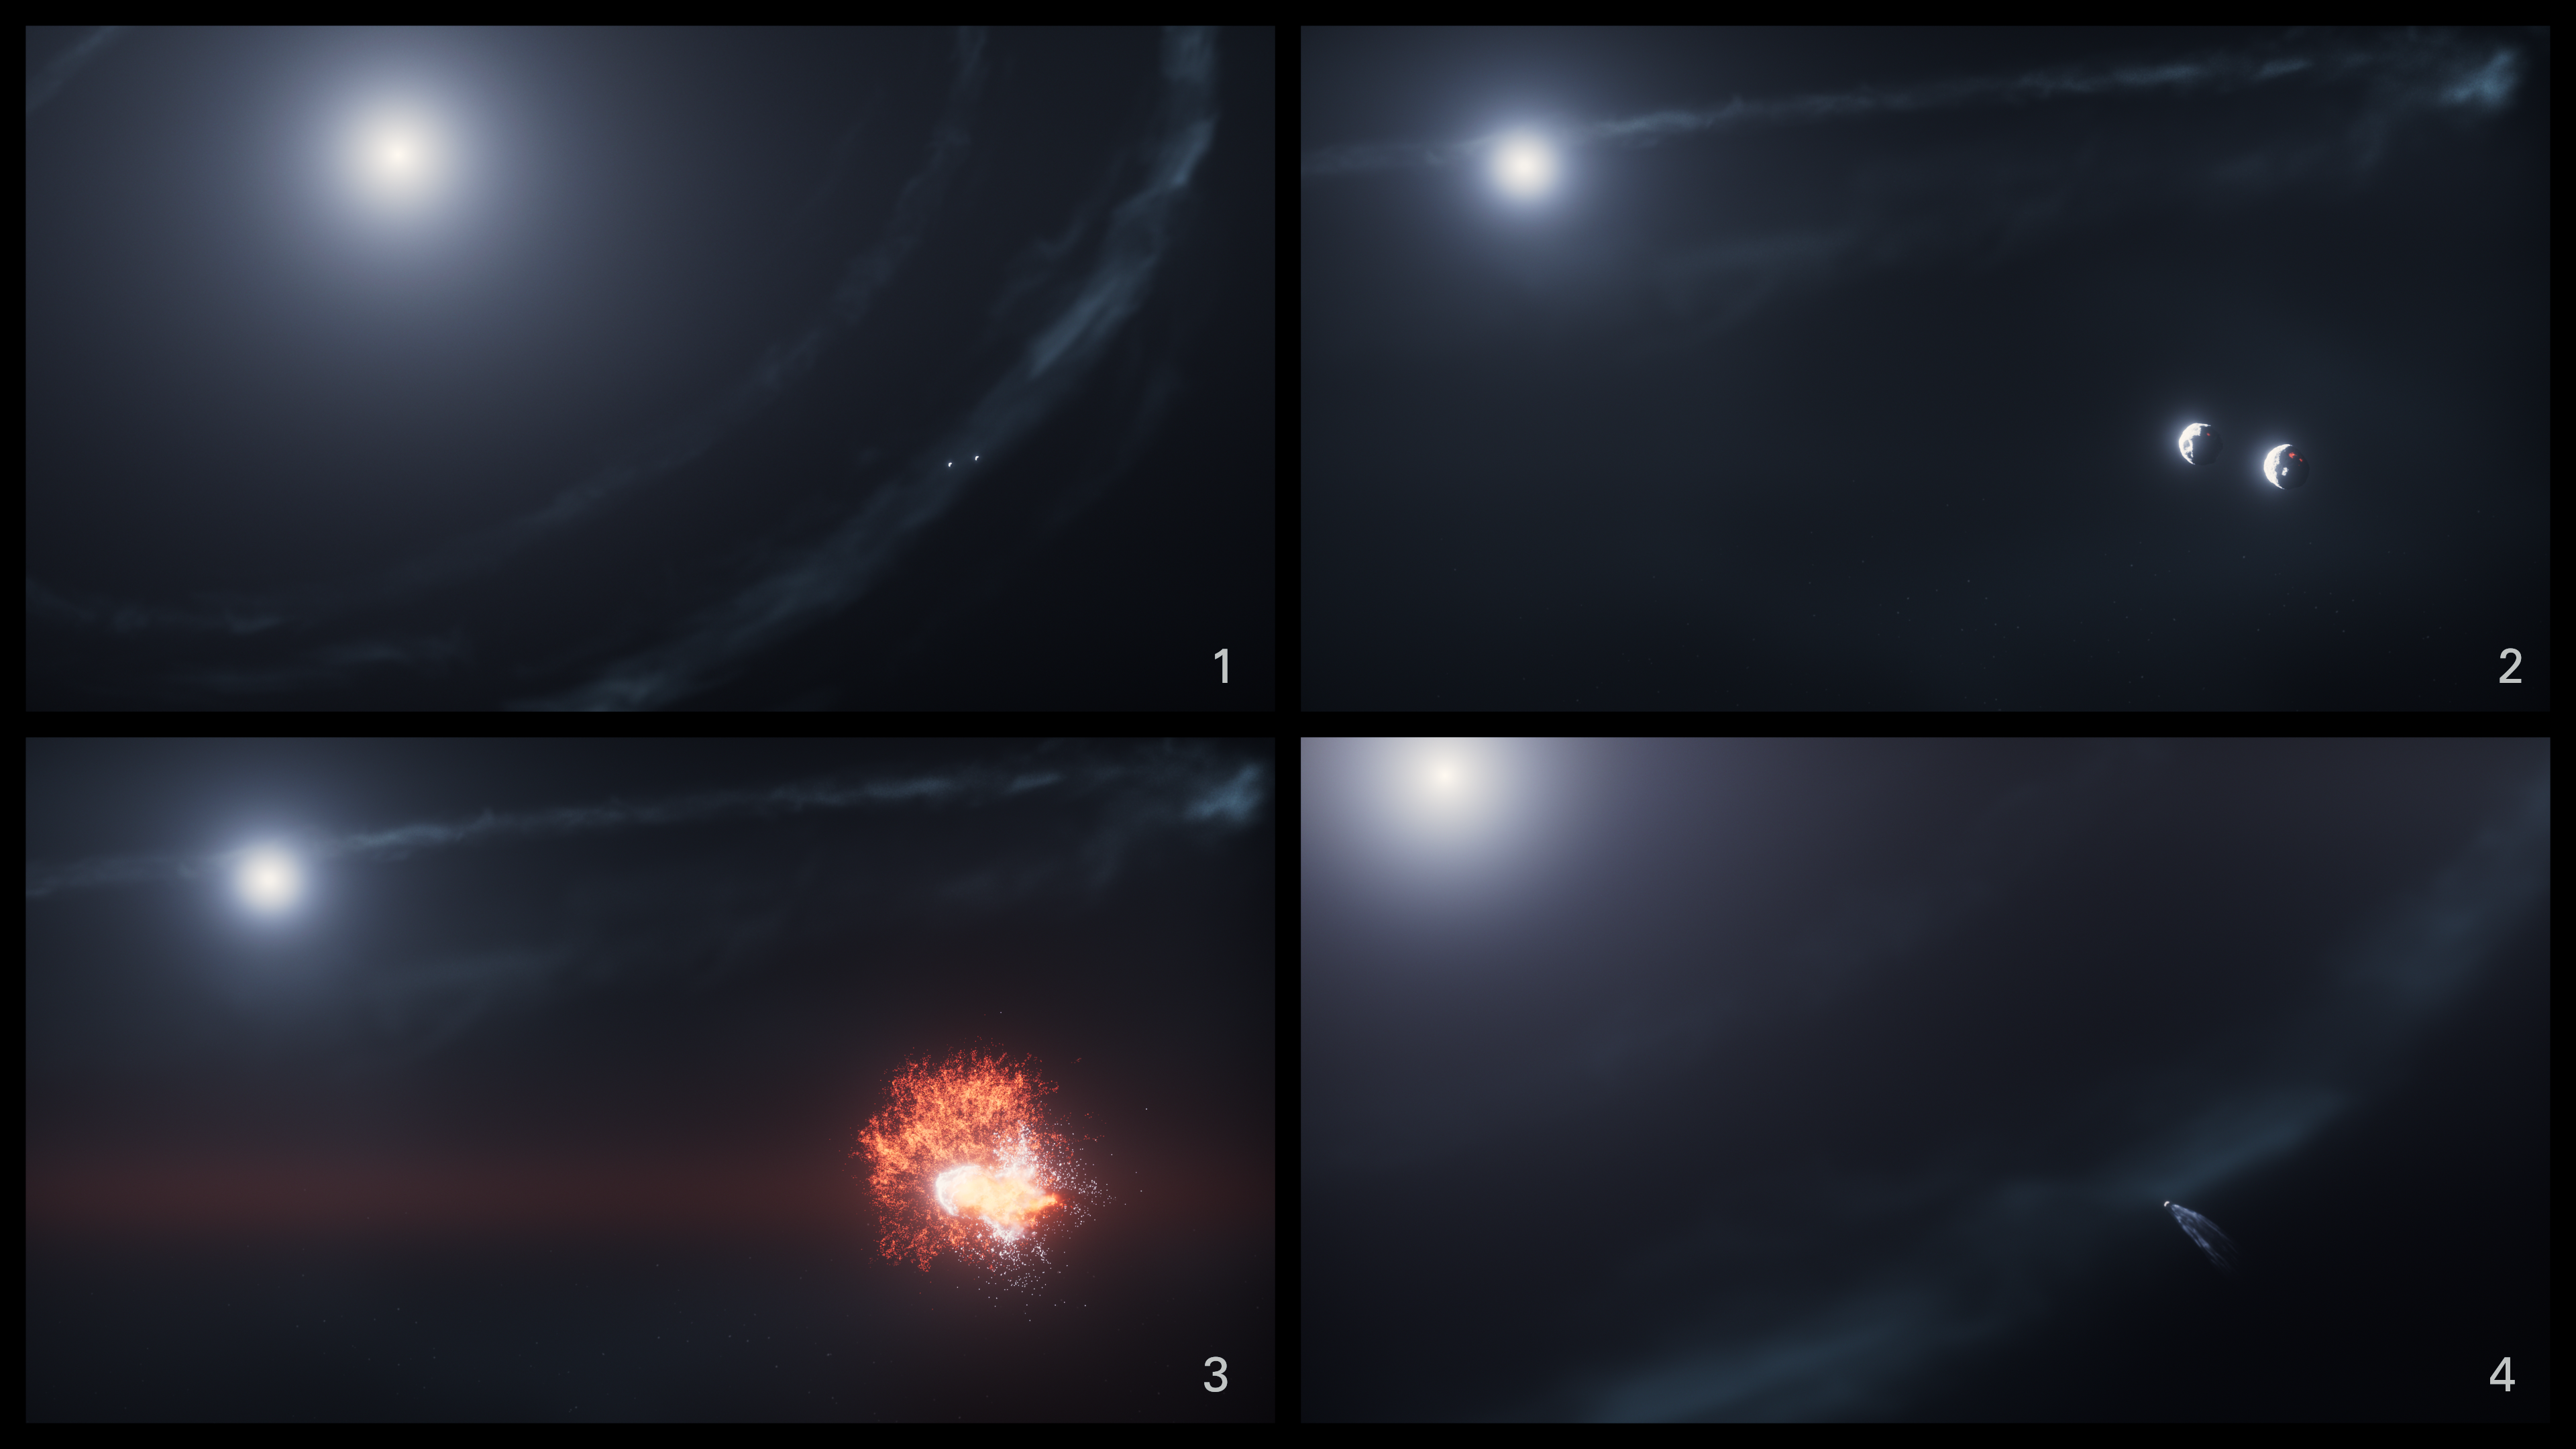

Fomalhaut cs2 (artist’s concept)

This artist’s concept shows the sequence of events leading up to the creation of dust cloud cs2 around the star Fomalhaut.

Credit: NASA, ESA, STScI, R. Crawford (STScI)